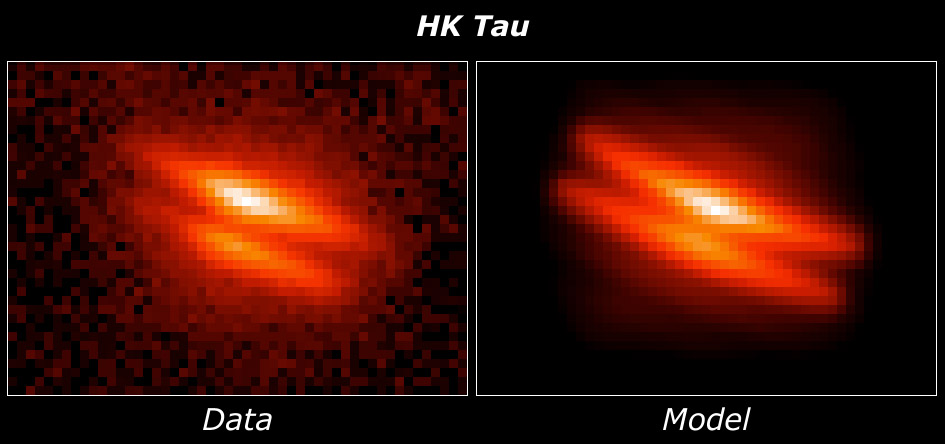

HK Tauri/c model comparison

Data [Left]: HST/WFPC2 image of HK Tauri/c, a young star with an edge-on disk of dust and gas. Light from the hidden star illuminates the dark disk at its upper and lower surfaces. The disk diameter is 210 AU.

Model [Right]: Computer simulation of an edge-on dusty disk which has been optimized to match the HST image of HK Tau/c. The model disk has a mass 1/10th that of Jupiter, and thickness less than 10% of its radius.

Credit: Karl Stapelfeldt (JPL) and colleagues